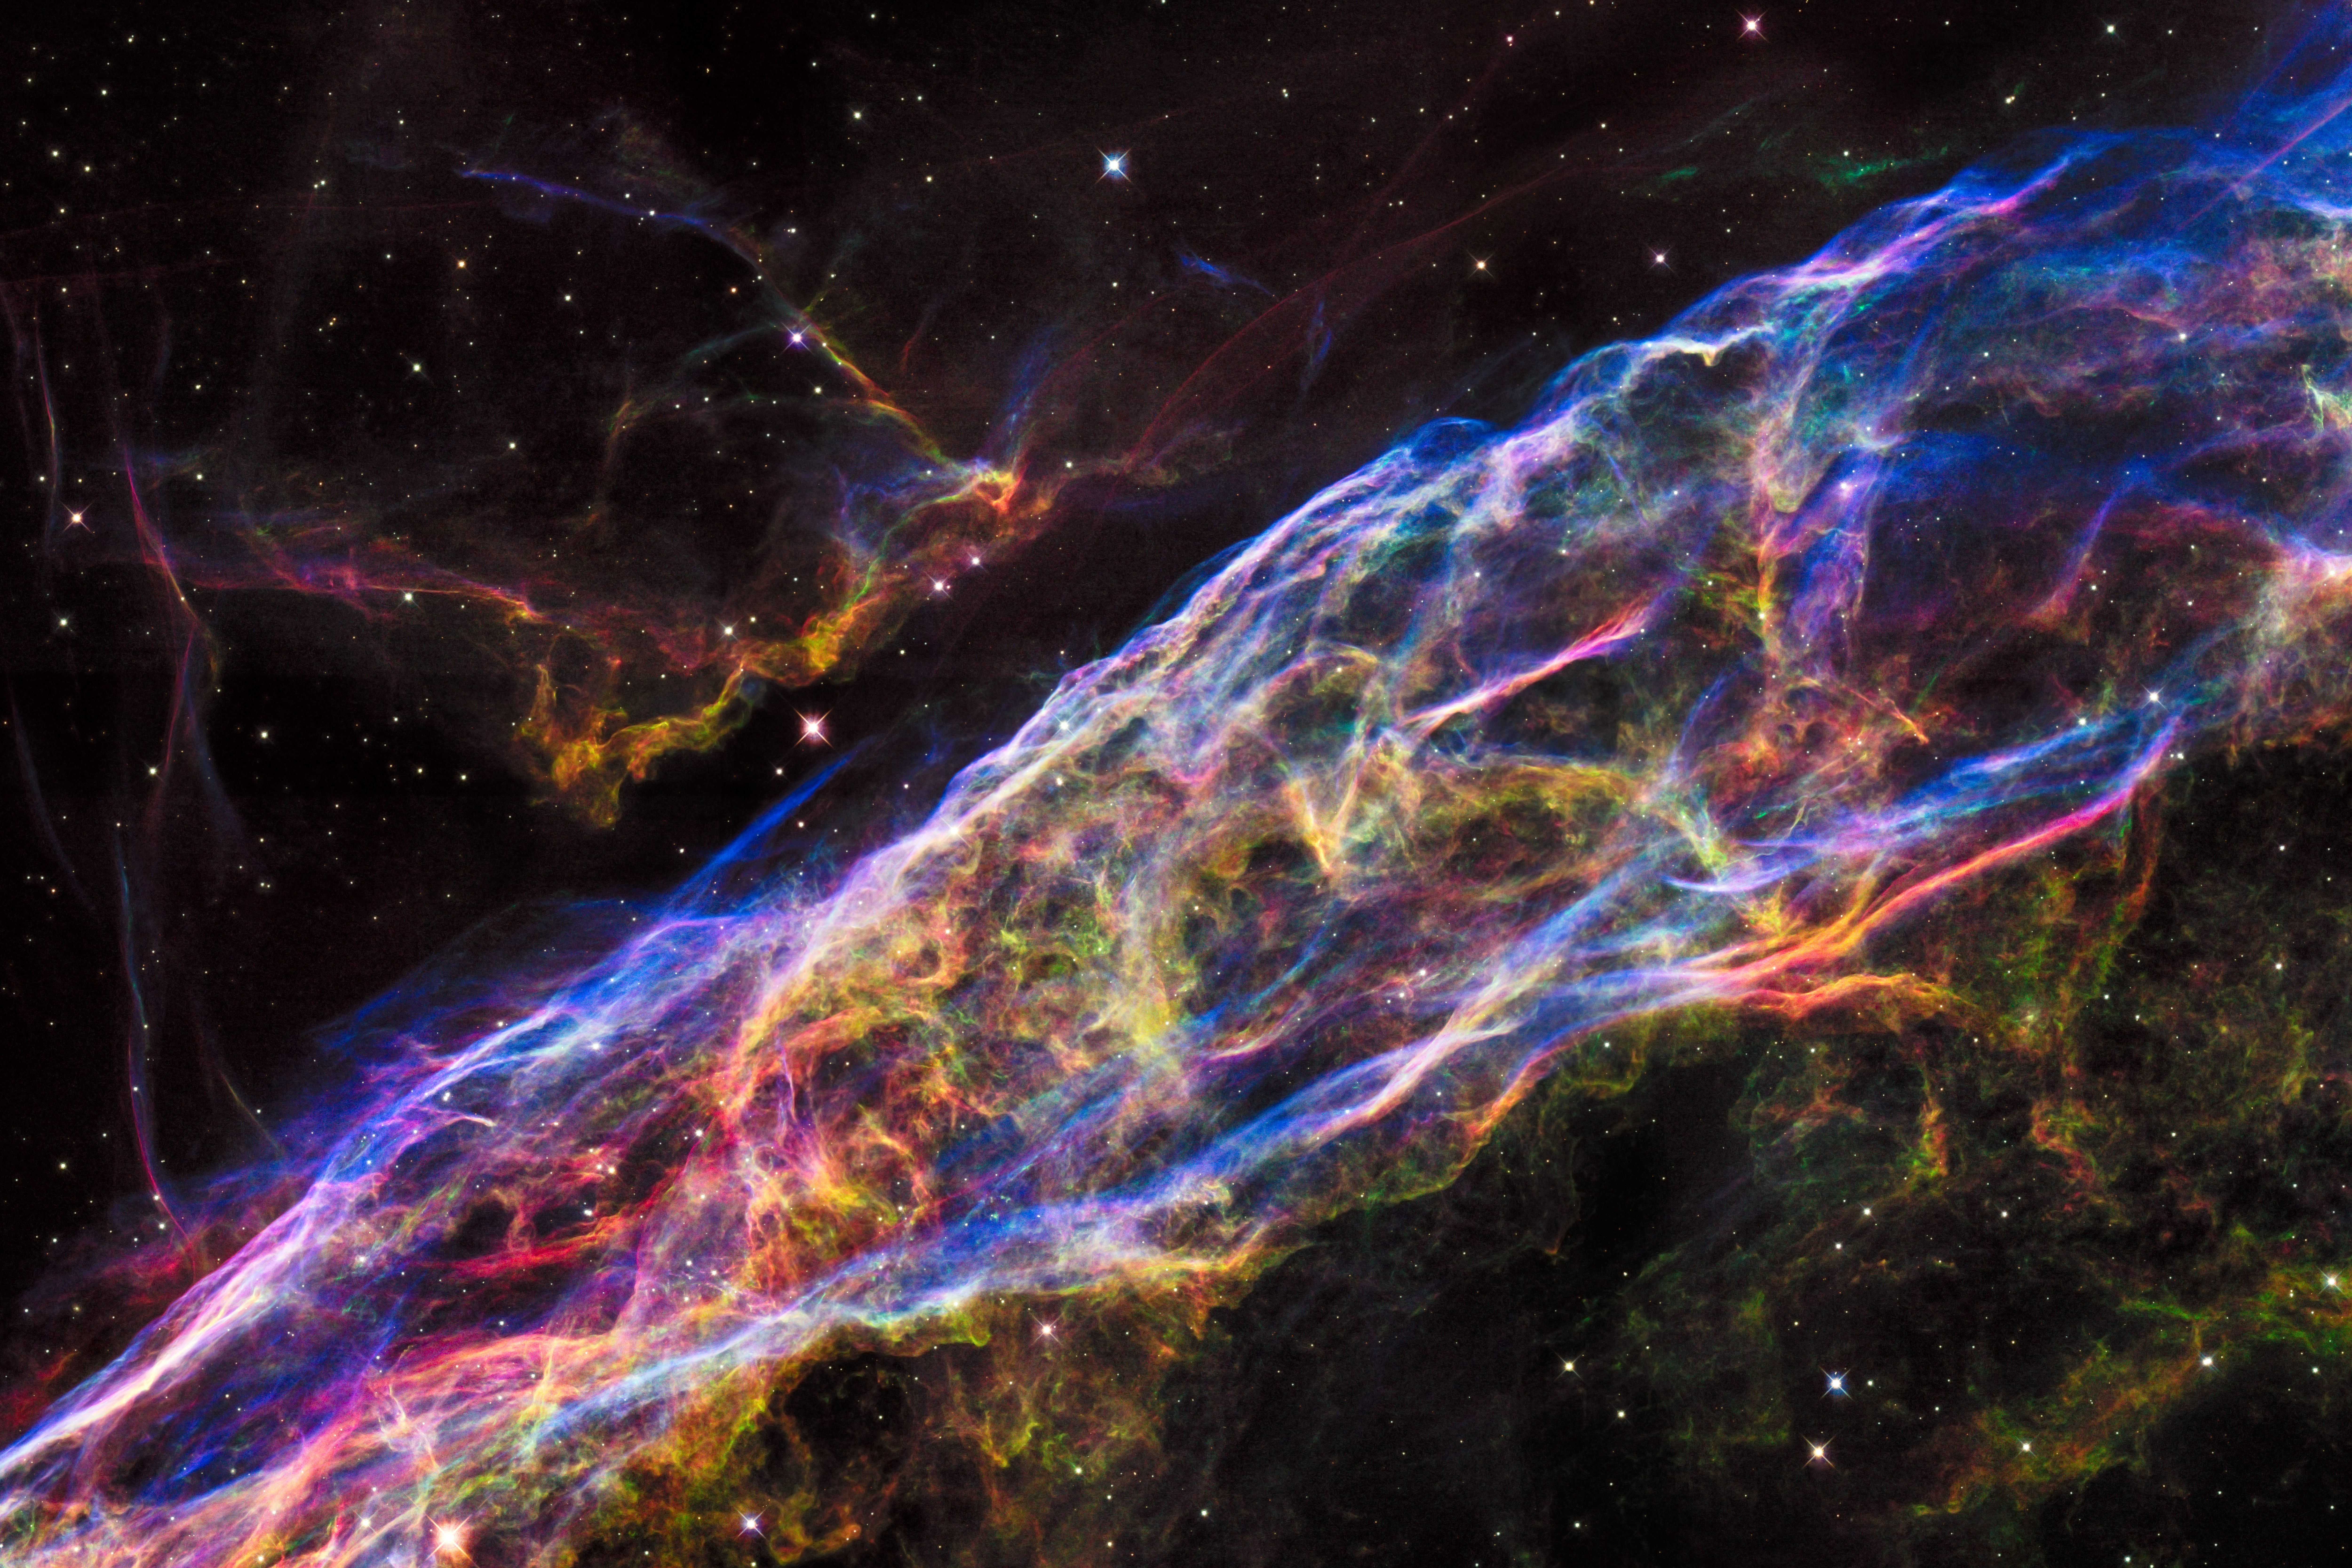

Revisiting the Veil Nebula

This image shows a small section of the Veil Nebula, as it was observed by the NASA/ESA Hubble Space Telescope. This section of the outer shell of the famous supernova remnant is in a region known as NGC 6960 or — more colloquially — the Witch’s Broom Nebula.

Credit: NASA, ESA, Hubble Heritage Team